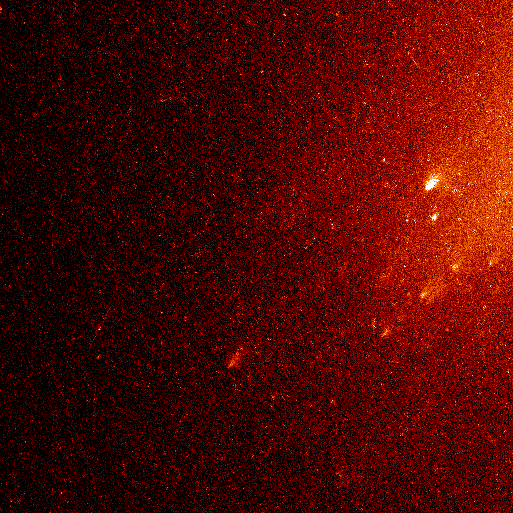

Comet Linear Fragments (Close-Up Version)

In one stunning Hubble picture the fate of the mysteriously vanished solid nucleus of Comet LINEAR has been settled. The Hubble picture shows that the comet nucleus has been reduced to a shower of glowing 'mini-comets' resembling the fiery fragments from an exploding aerial firework.

Credit: NASA/ESA, Harold Weaver (the Johns Hopkins University), and the HST Comet LINEAR Investigation Team.